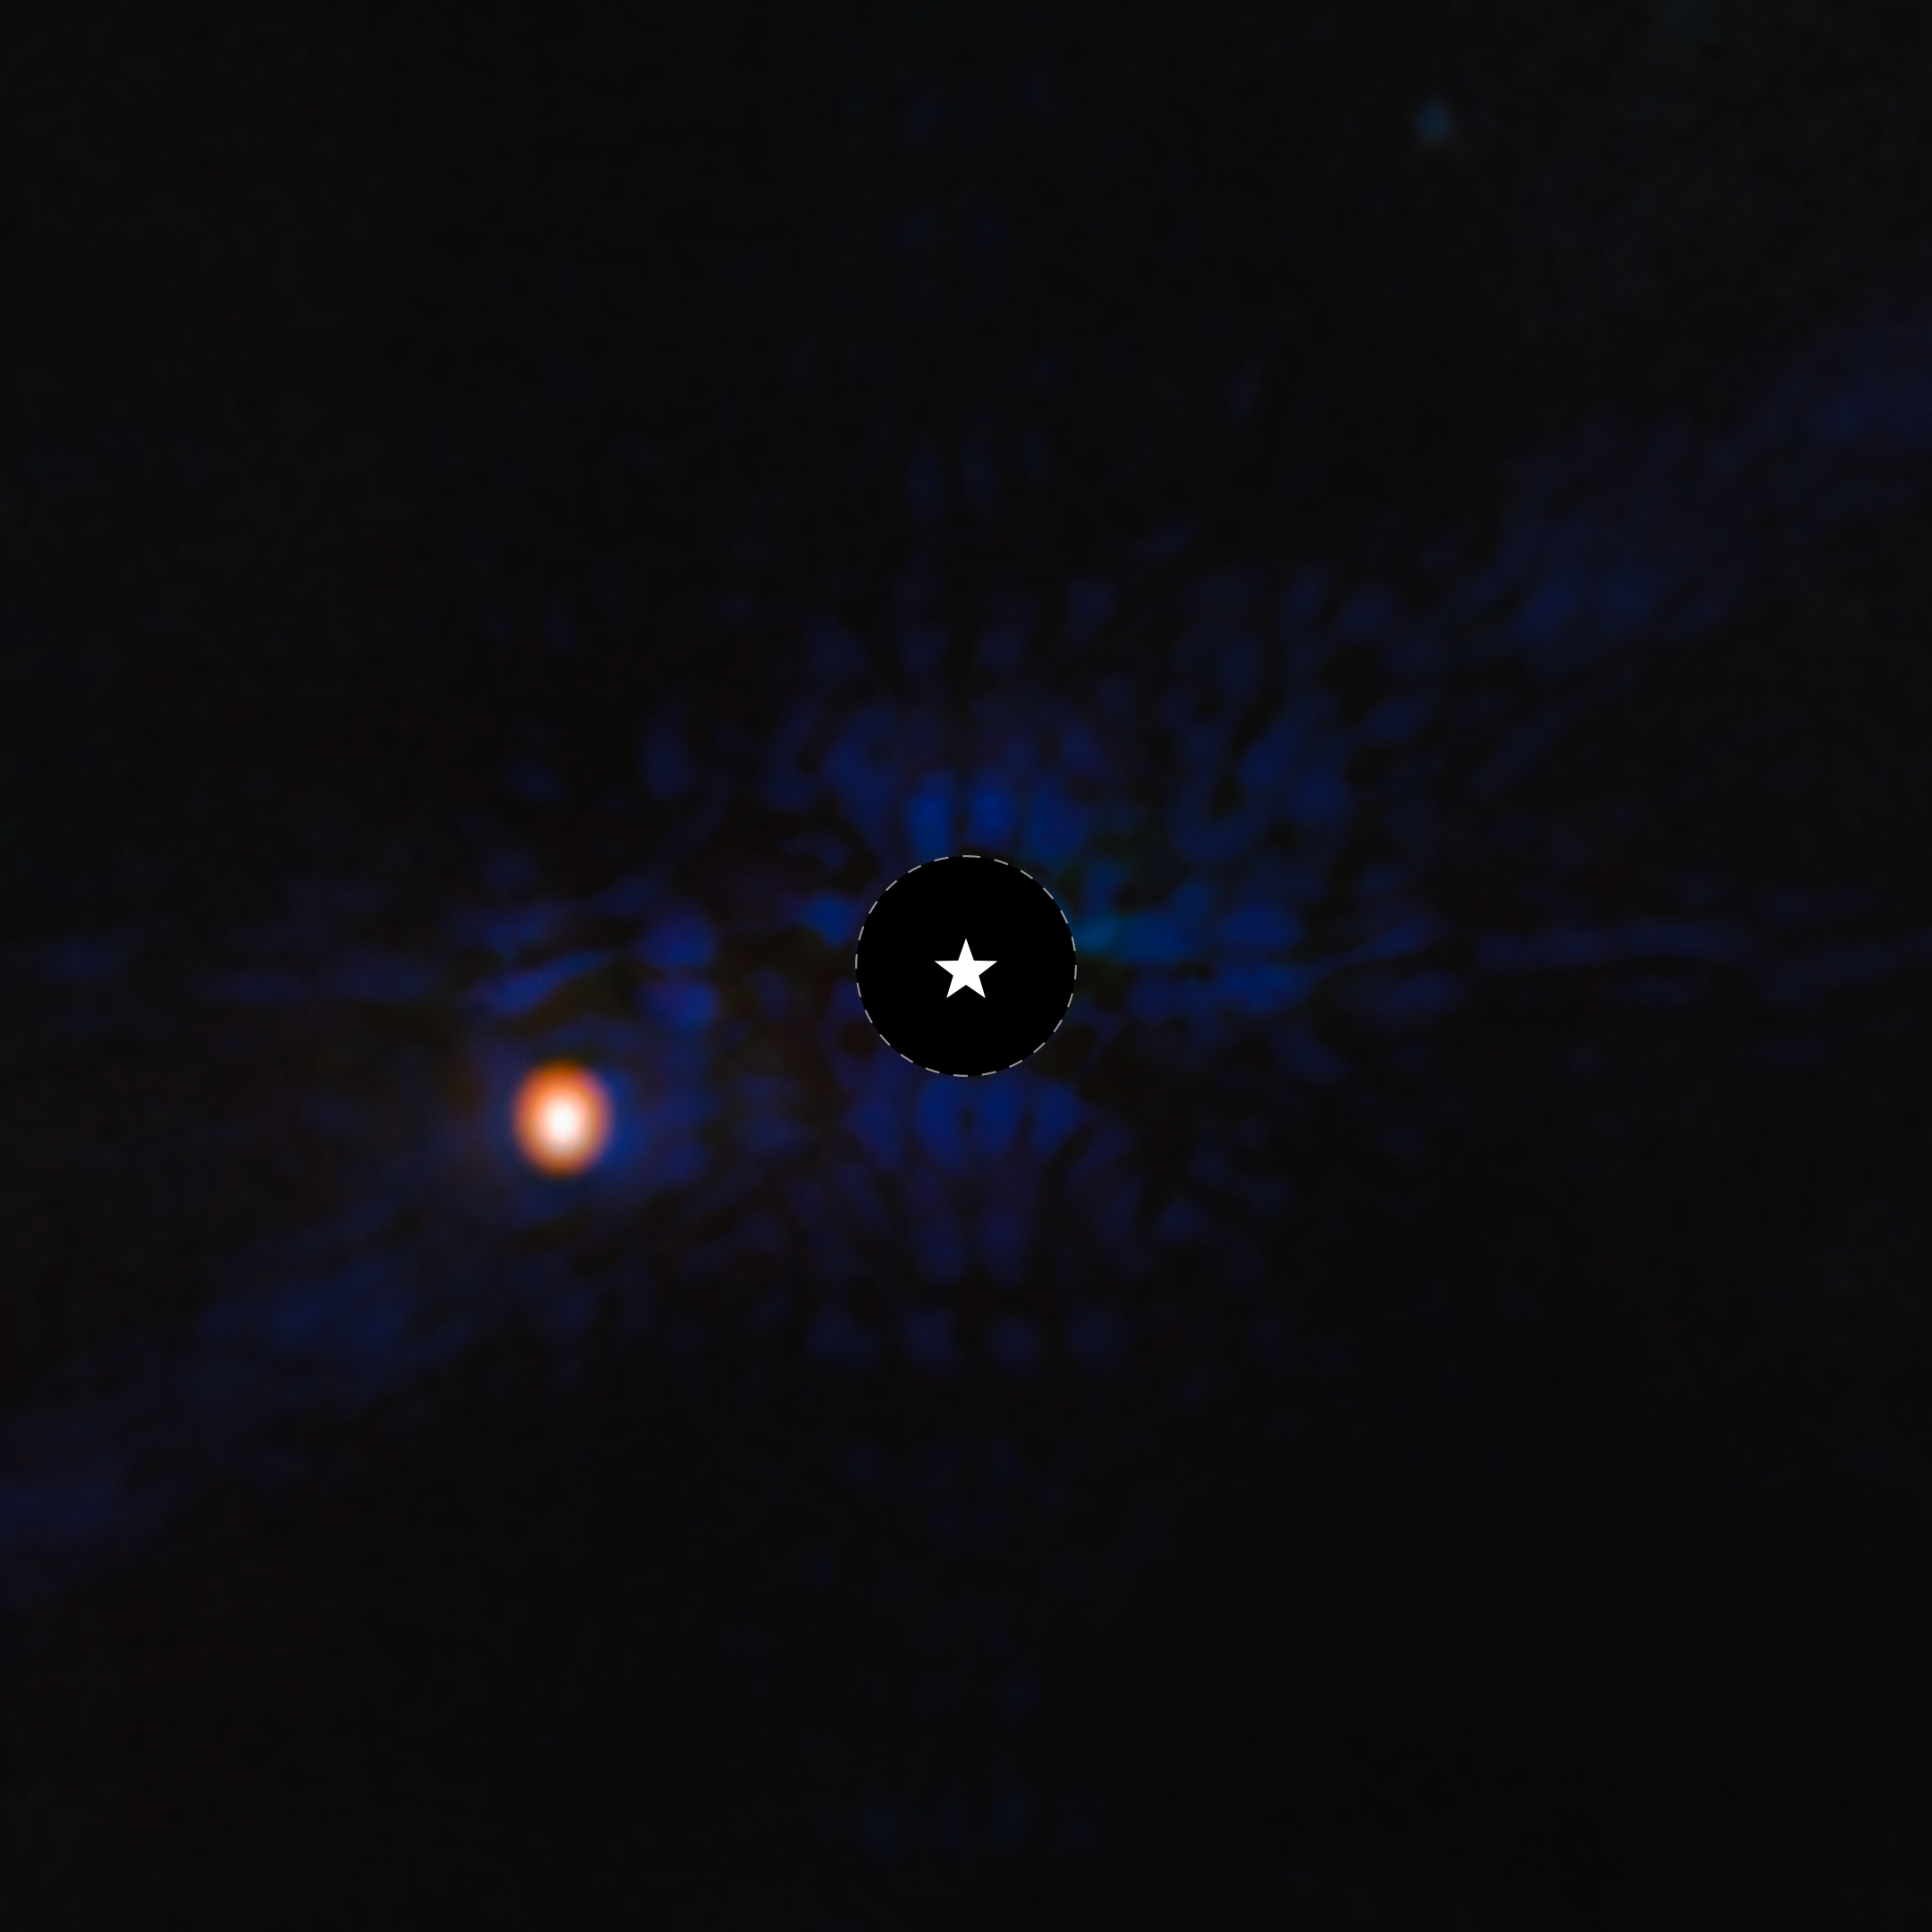

Exoplanet Epsilon Indi Ab (MIRI image)

This image of the gas-giant exoplanet Epsilon Indi Ab was taken with the coronagraph on the NASA/ESA/CSA James Webb Space Telescope’s MIRI (Mid-Infrared Instrument). A star symbol marks the location of the host star Epsilon Indi A, whose light has been blocked by the coronagraph, resulting in the dark circle marked with a dashed white line. Epsilon Indi Ab is one of the coldest exoplanets ever directly imaged. Light at 10.6 microns was assigned the color blue, while light at 15.5 microns was assigned the color orange. MIRI did not resolve the planet, which is a point source.

Credit: ESA/Webb, NASA, CSA, STScI, E. Matthews (Max Planck Institute for Astronomy)